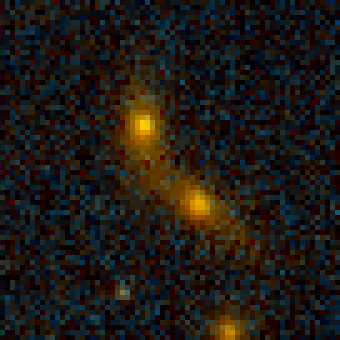

Galaxy Cluster MS1054-03

Exciting Hubble Space Telescope images of more than a dozen very distant colliding galaxies indicate that, at least in some cases, big massive galaxies form through collisions between smaller ones, in a 'generation after generation' never-ending story.

Credit: ESA/NASA, Pieter van Dokkum (University of Groningen/Leiden), Marijn Franx (University of Groningen/Leiden)